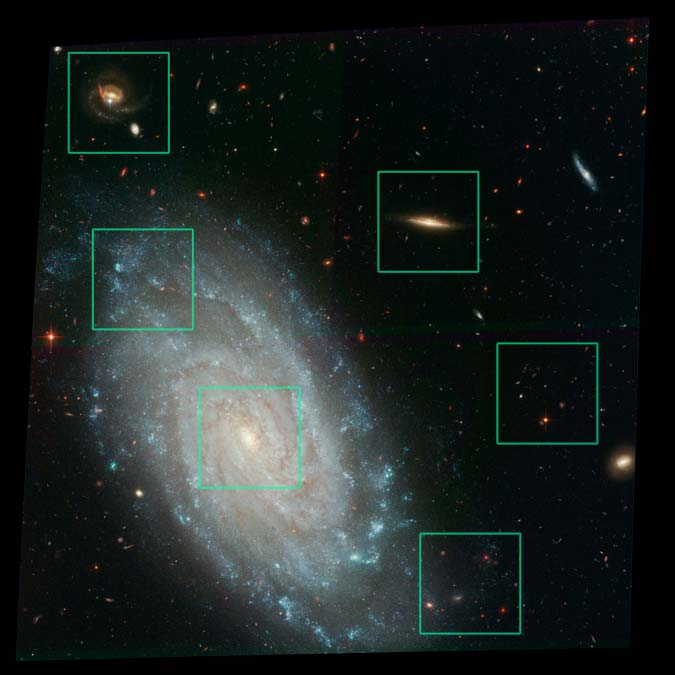

Details from ACS Image of NGC 3370

Amid a backdrop of far-off galaxies, the majestic dusty spiral, NGC 3370, looms in the foreground in this NASA/ESA Hubble Space Telescope image. Recent observations taken with the Advanced Camera for Surveys show intricate spiral arm structure spotted with hot areas of new star formation.

Credit: NASA/ESA and A. Riess (STScI)